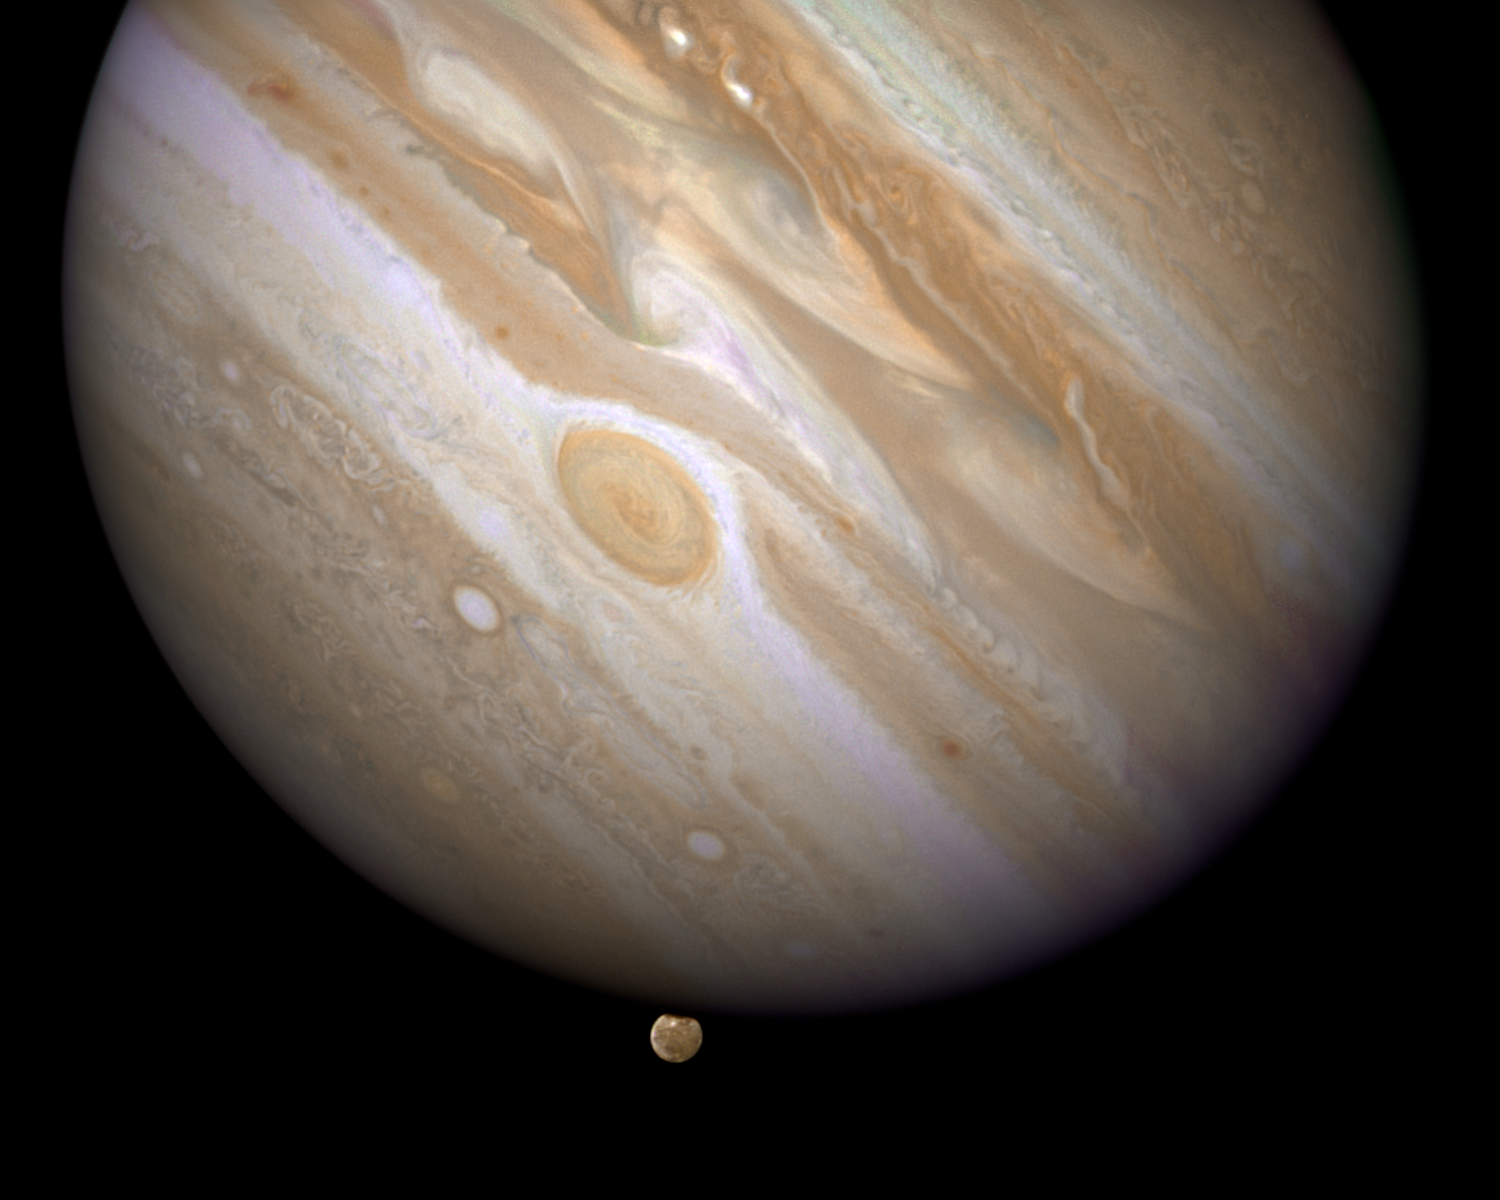

Constituent image for Jupiter/Ganymede compass and scale image

In this crisp Hubble image, Ganymede is shown just before it ducks behind the giant planet.Composed of rock and ice, Ganymede is the largest moon in our Solar System. It is even larger than the planet Mercury. But Ganymede looks like a dirty snowball next to Jupiter, the largest planet in our Solar System. Jupiter is so big that only part of its Southern Hemisphere can be seen in this image.

Hubble's view is so sharp that astronomers can see features on Ganymede's surface, most notably the white impact crater, Tros, and its system of rays, bright streaks of material blasted from the crater.

The image also shows Jupiter's Great Red Spot, the large eye-shaped feature near the centre

Credit: NASA, ESA and E. Karkoschka (University of Arizona)